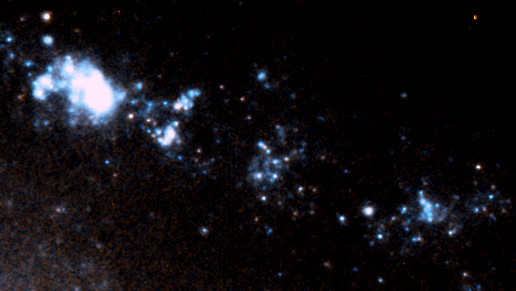

Blow-up of area around GRB 980425

This is an enlargement of a combined image obtained with the Space Telescope Imaging Spectrograph (STIS) onboard the NASA/ESA Hubble Space Telescope through a clear filter (shown in blue) and a red filter (shown in red).

The region shows the star-formation taking place around the gamma-ray burst region in the galaxy ESO 184-G82. Clearly seen is an underlying hydrogen gas complex is overlaid with several bright red giant stars.

The Hubble observations were carried out 12 June 2000. This colour composite was constructed from two exposures combined in chromatic order: 1240 seconds through the clear filter (in blue), and 1185 seconds through a red filter (in red). The field of view of the image measures 13 x 7 arcseconds.

Credit: ESA, Stephen Holland (Danish Centre for Astrophysics with the HST), Jens Hjorth, Johan Fynbo (University of Copenhagen)